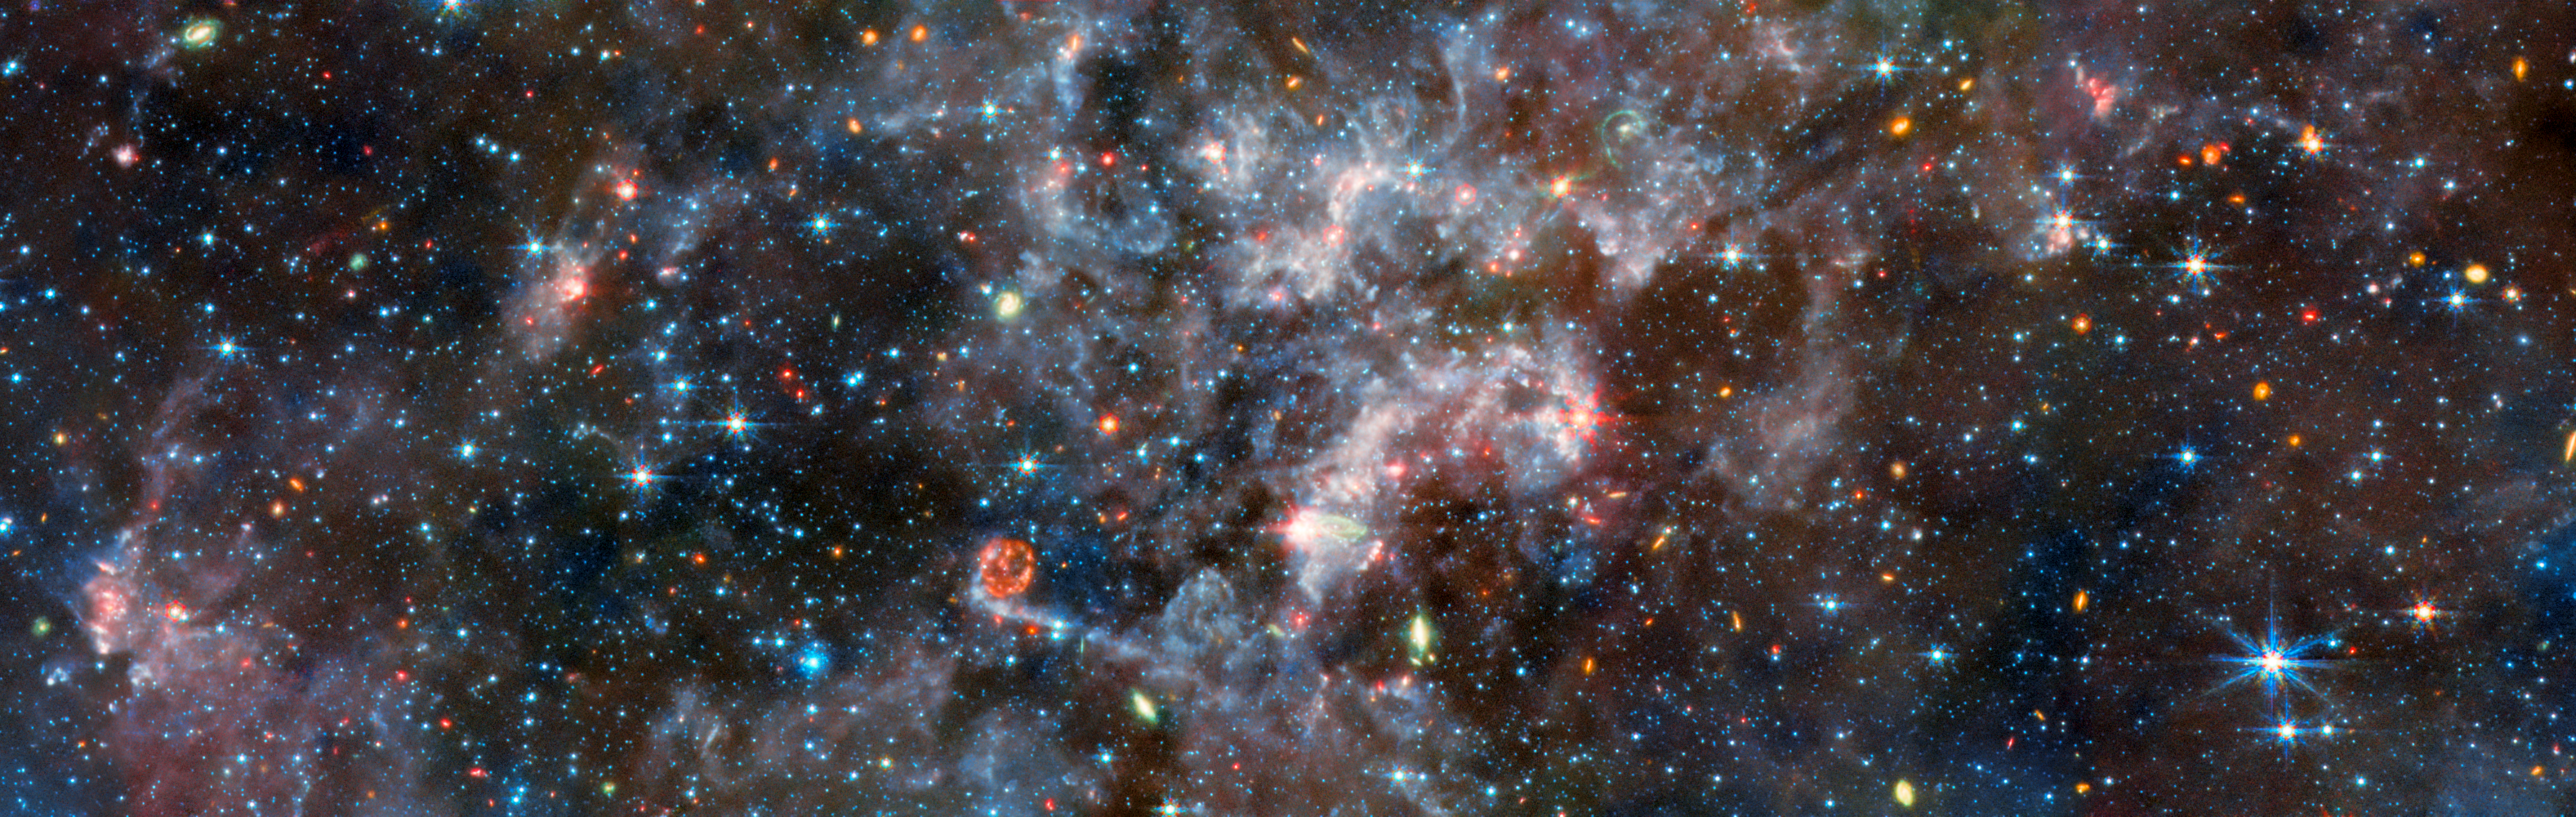

NGC 6822 (MIRI image)

This image shows the irregular galaxy NGC 6822, as observed by the Mid-InfraRed Instrument (MIRI) mounted on the NASA/ESA/CSA James Webb Space Telescope. MIRI probes the mid-infrared, which in this case makes it perfectly suited to observe the dense regions of gas that suffuse this galaxy.

At mid-infrared wavelengths the emission of light by galactic dust is prominent, obscuring the galaxy’s stars which themselves are faint at these longer wavelengths. Brilliant blue gas indicates light emitted by organic compounds called polycyclic aromatic hydrocarbons, which play a critical role in the formation of stars and planets. Cyan marks cooler patches of dust, while warmer dust is more orange.

Distant galaxies far beyond NGC 6822 are displayed in orange. The few galaxies that are relatively closer, meanwhile, are marked in green by their own light-emitting dust, which MIRI can pick out. Bright red and magenta colours indicate active areas of star formation in the galaxy. With so many stars, supernova explosions are routine, and an amazing example of a supernova remnant is visible in this image: a red ring just below the centre.

This image has been slightly downscaled from the original MIRI image, which you can view here.

Credit: ESA/Webb, NASA & CSA, M. Meixner